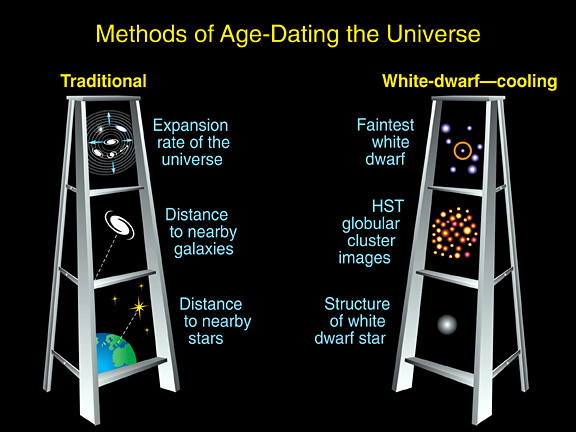

So how old are you really?

This illustration outlines the two techniques astronomers have used to determine the universe's age.

In the 'traditional method, ' astronomers used measurements of the universe's expansion rate to calculate the age of the cosmos. They determined the expansion rate by measuring the distances to nearby galaxies. They then compared those measurements with the speed at which those galaxies are receding from Earth. Astronomers used that data to calculate the universe's age.

In the 'white-dwarf-cooling method, ' astronomers studied the faintest white dwarfs in a globular cluster. Globular clusters are among the oldest clusters of stars in the universe. And the faintest and coolest white dwarfs within globular clusters represent the oldest stars in the clusters. Earlier Hubble observations showed that the first stars formed less than 1 billion years after the universe's birth in the big bang. So, finding the oldest stars puts astronomers within arm's reach of the universe's age.

Credit: NASA/ESA and A. Feild